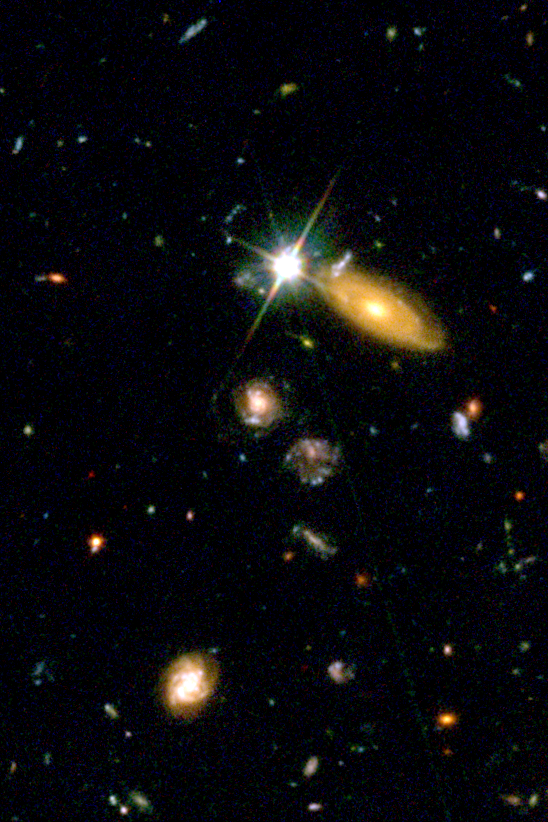

SN2002dd in the HDF North - 1995

A Hubble Space Telescope image of a portion of the Hubble Deep Field North as originally photographed in 1995 with the Wide Field Planetary Camera 2.

Credit: NASA/ESA and J. Blakeslee (JHU)